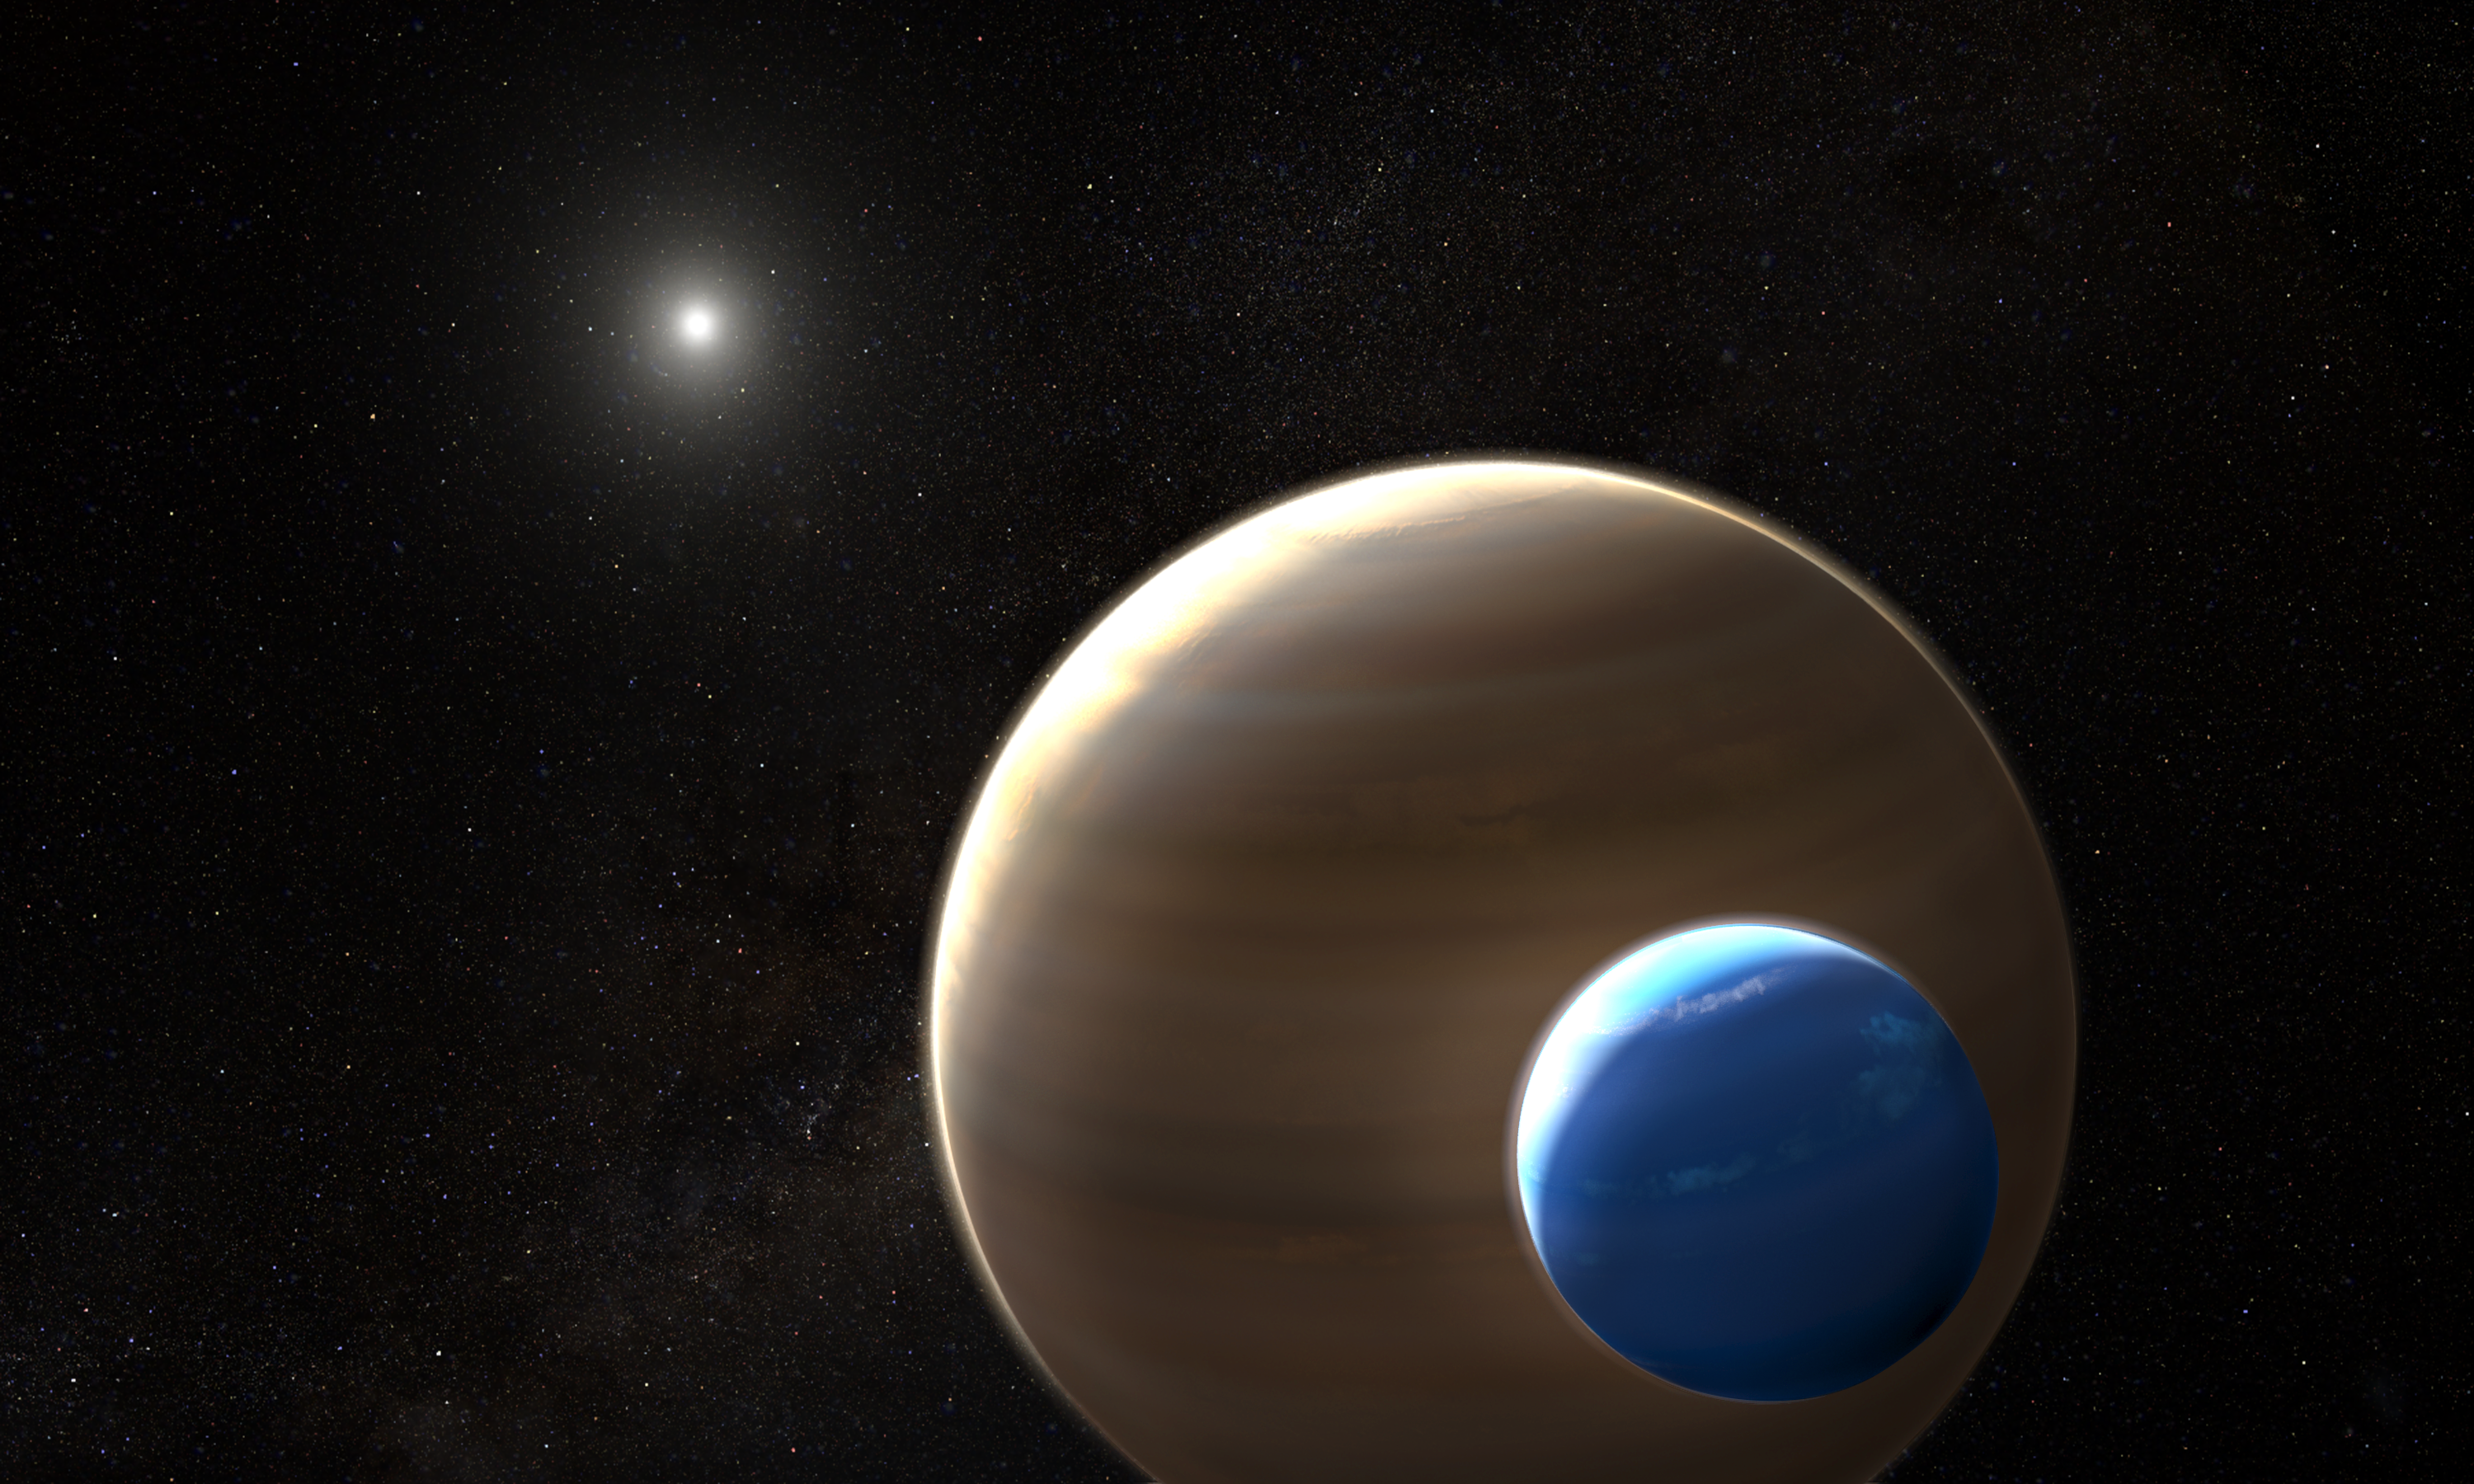

Exomoon orbiting its planet (artist’s impression)

This artist’s impression depicts the exomoon candidate Kepler-1625b-i, the planet it is orbiting and the star in the centre of the star system. Kepler-1625b-i is the first exomoon candidate and, if confirmed, the first moon to be found outside the Solar System.

Like many exoplanets, Kepler-1625b-i was discovered using the transit method. Exomoons are difficult to find because they are smaller than their companion planets, so their transit signal is weak, and their position in the system changes with each transit because of their orbit. This requires extensive modelling and data analysis.

Credit: NASA, ESA, and L. Hustak (STScI)